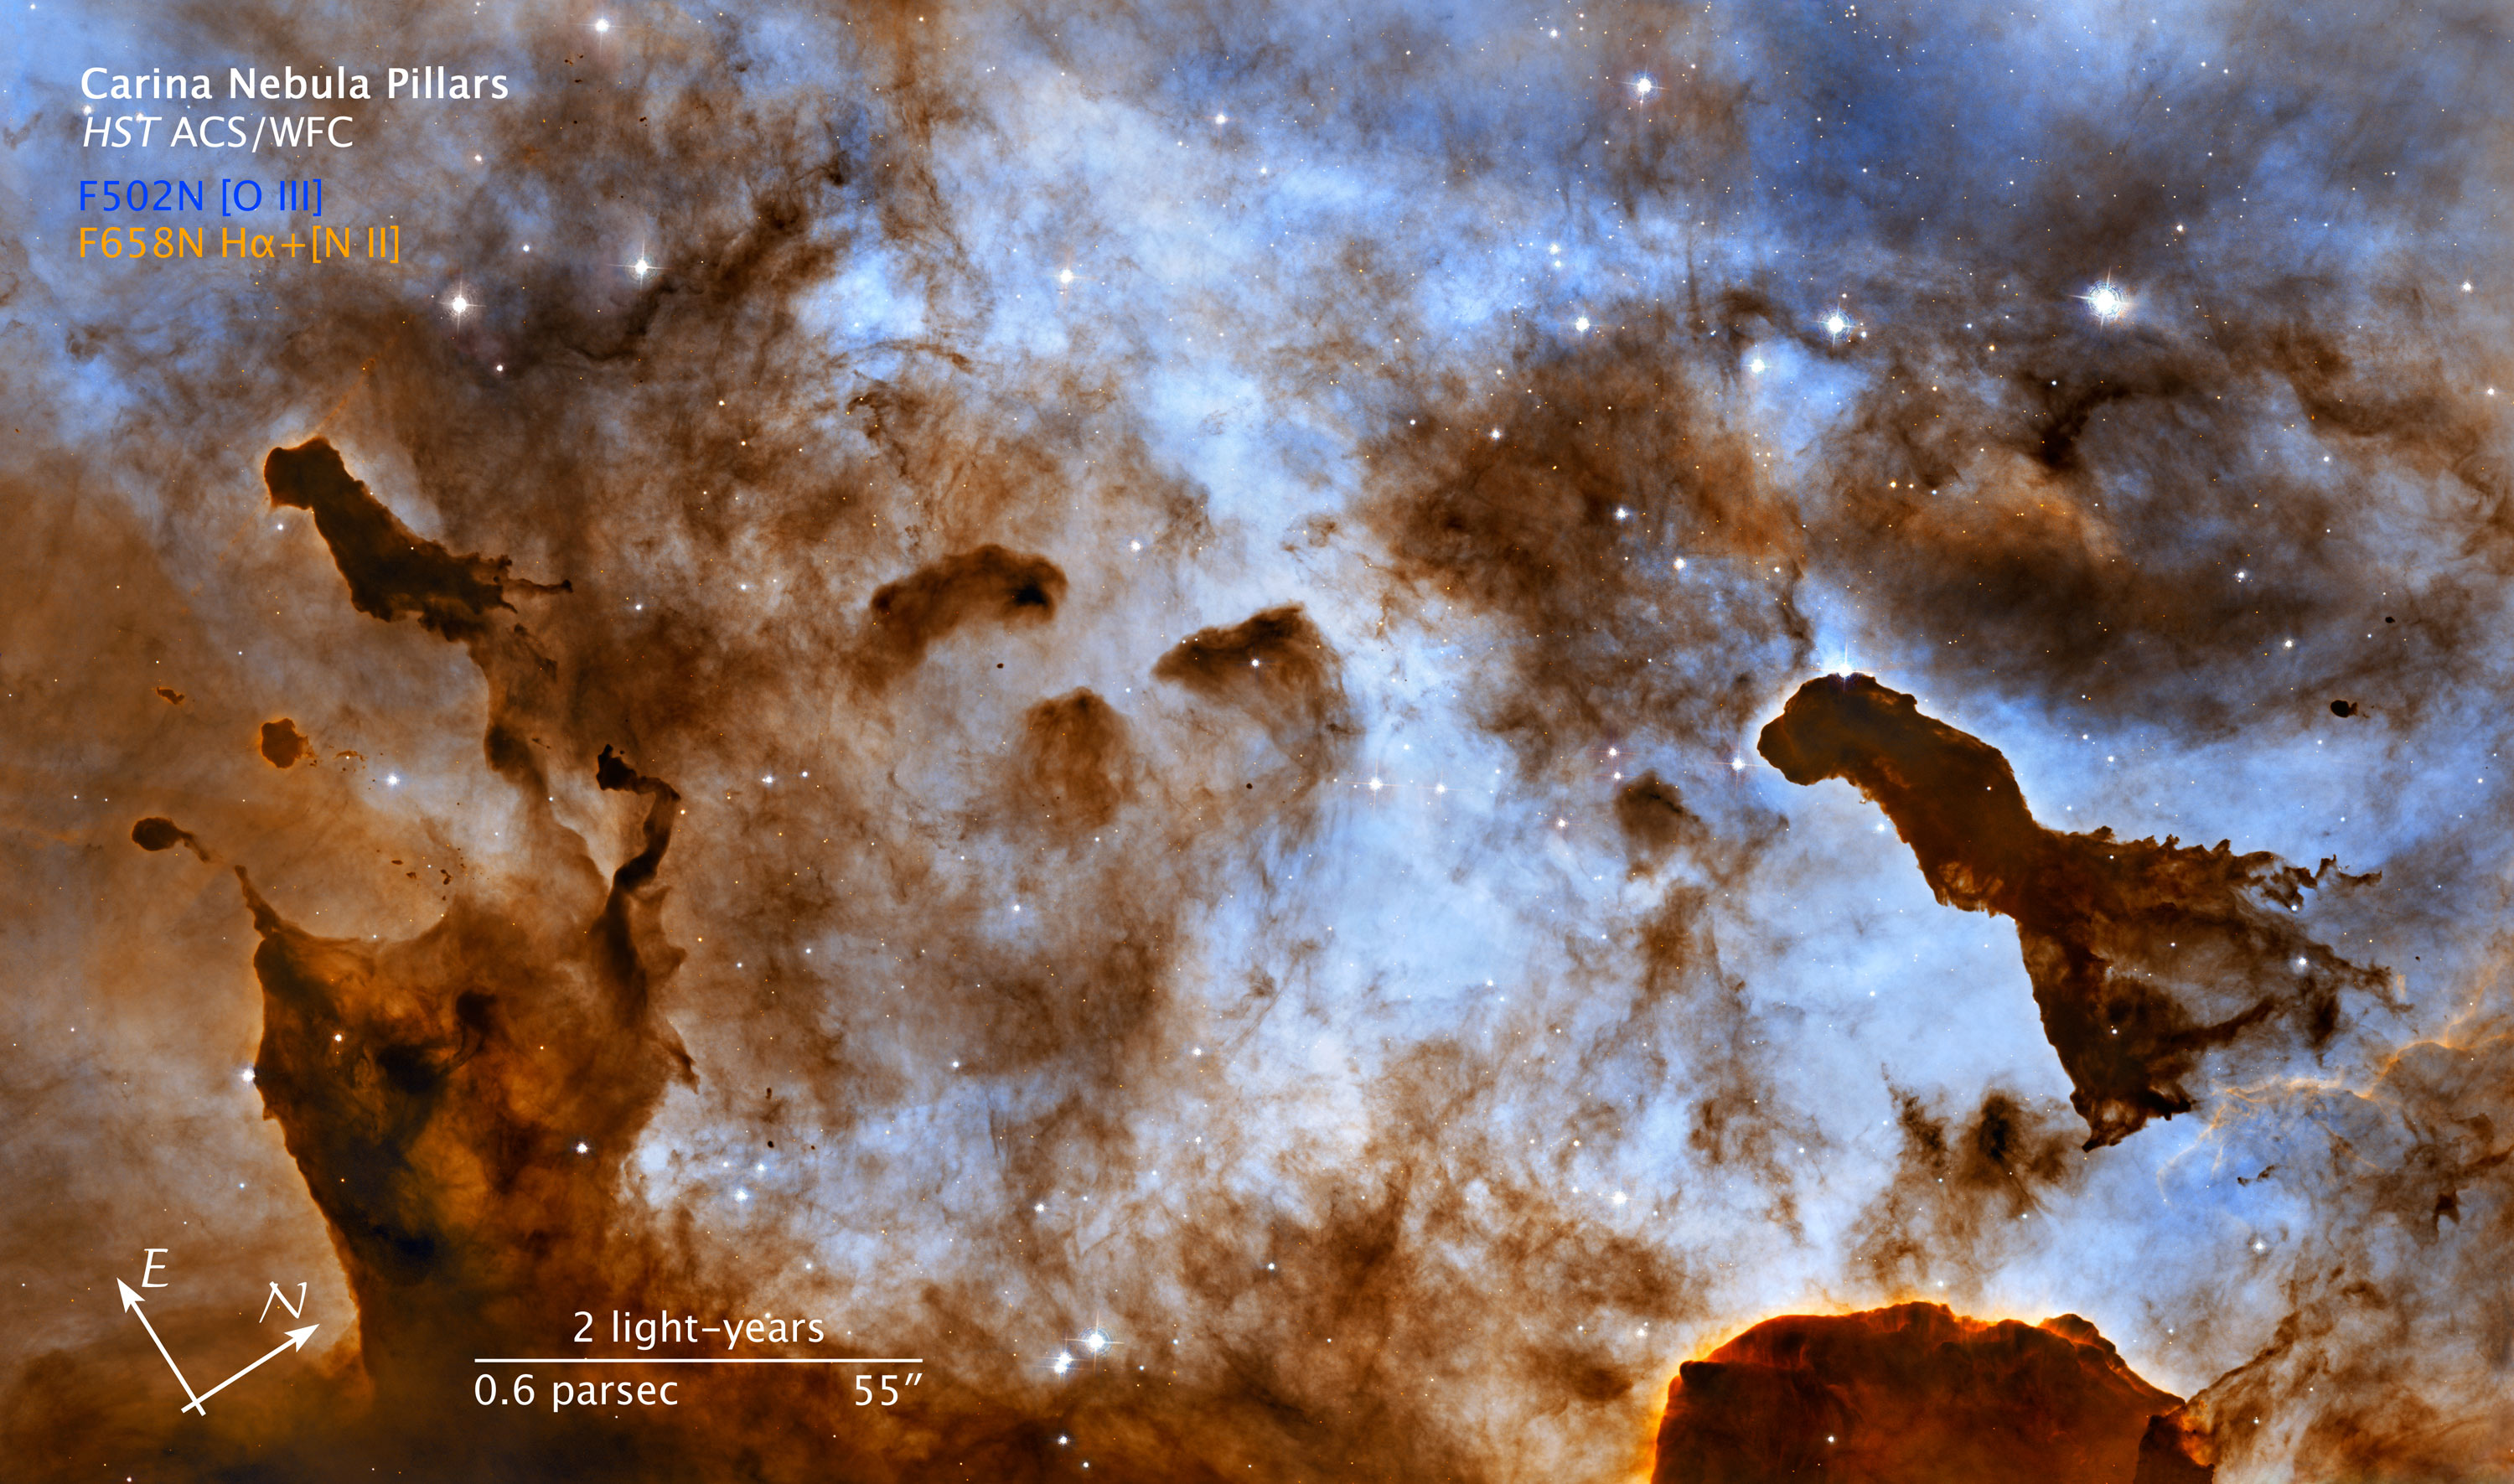

Compass and scale image for Carina Nebula pillars

Compass and scale image for Carina Nebula pillars (taken by the Hubble's Advanced Camera for Surveys).

Credit: NASA, ESA, and the Hubble Heritage Team (STScI/AURA). Acknowledgment: M. Livio (STScI) and N. Smith (University of California, Berkeley, USA)